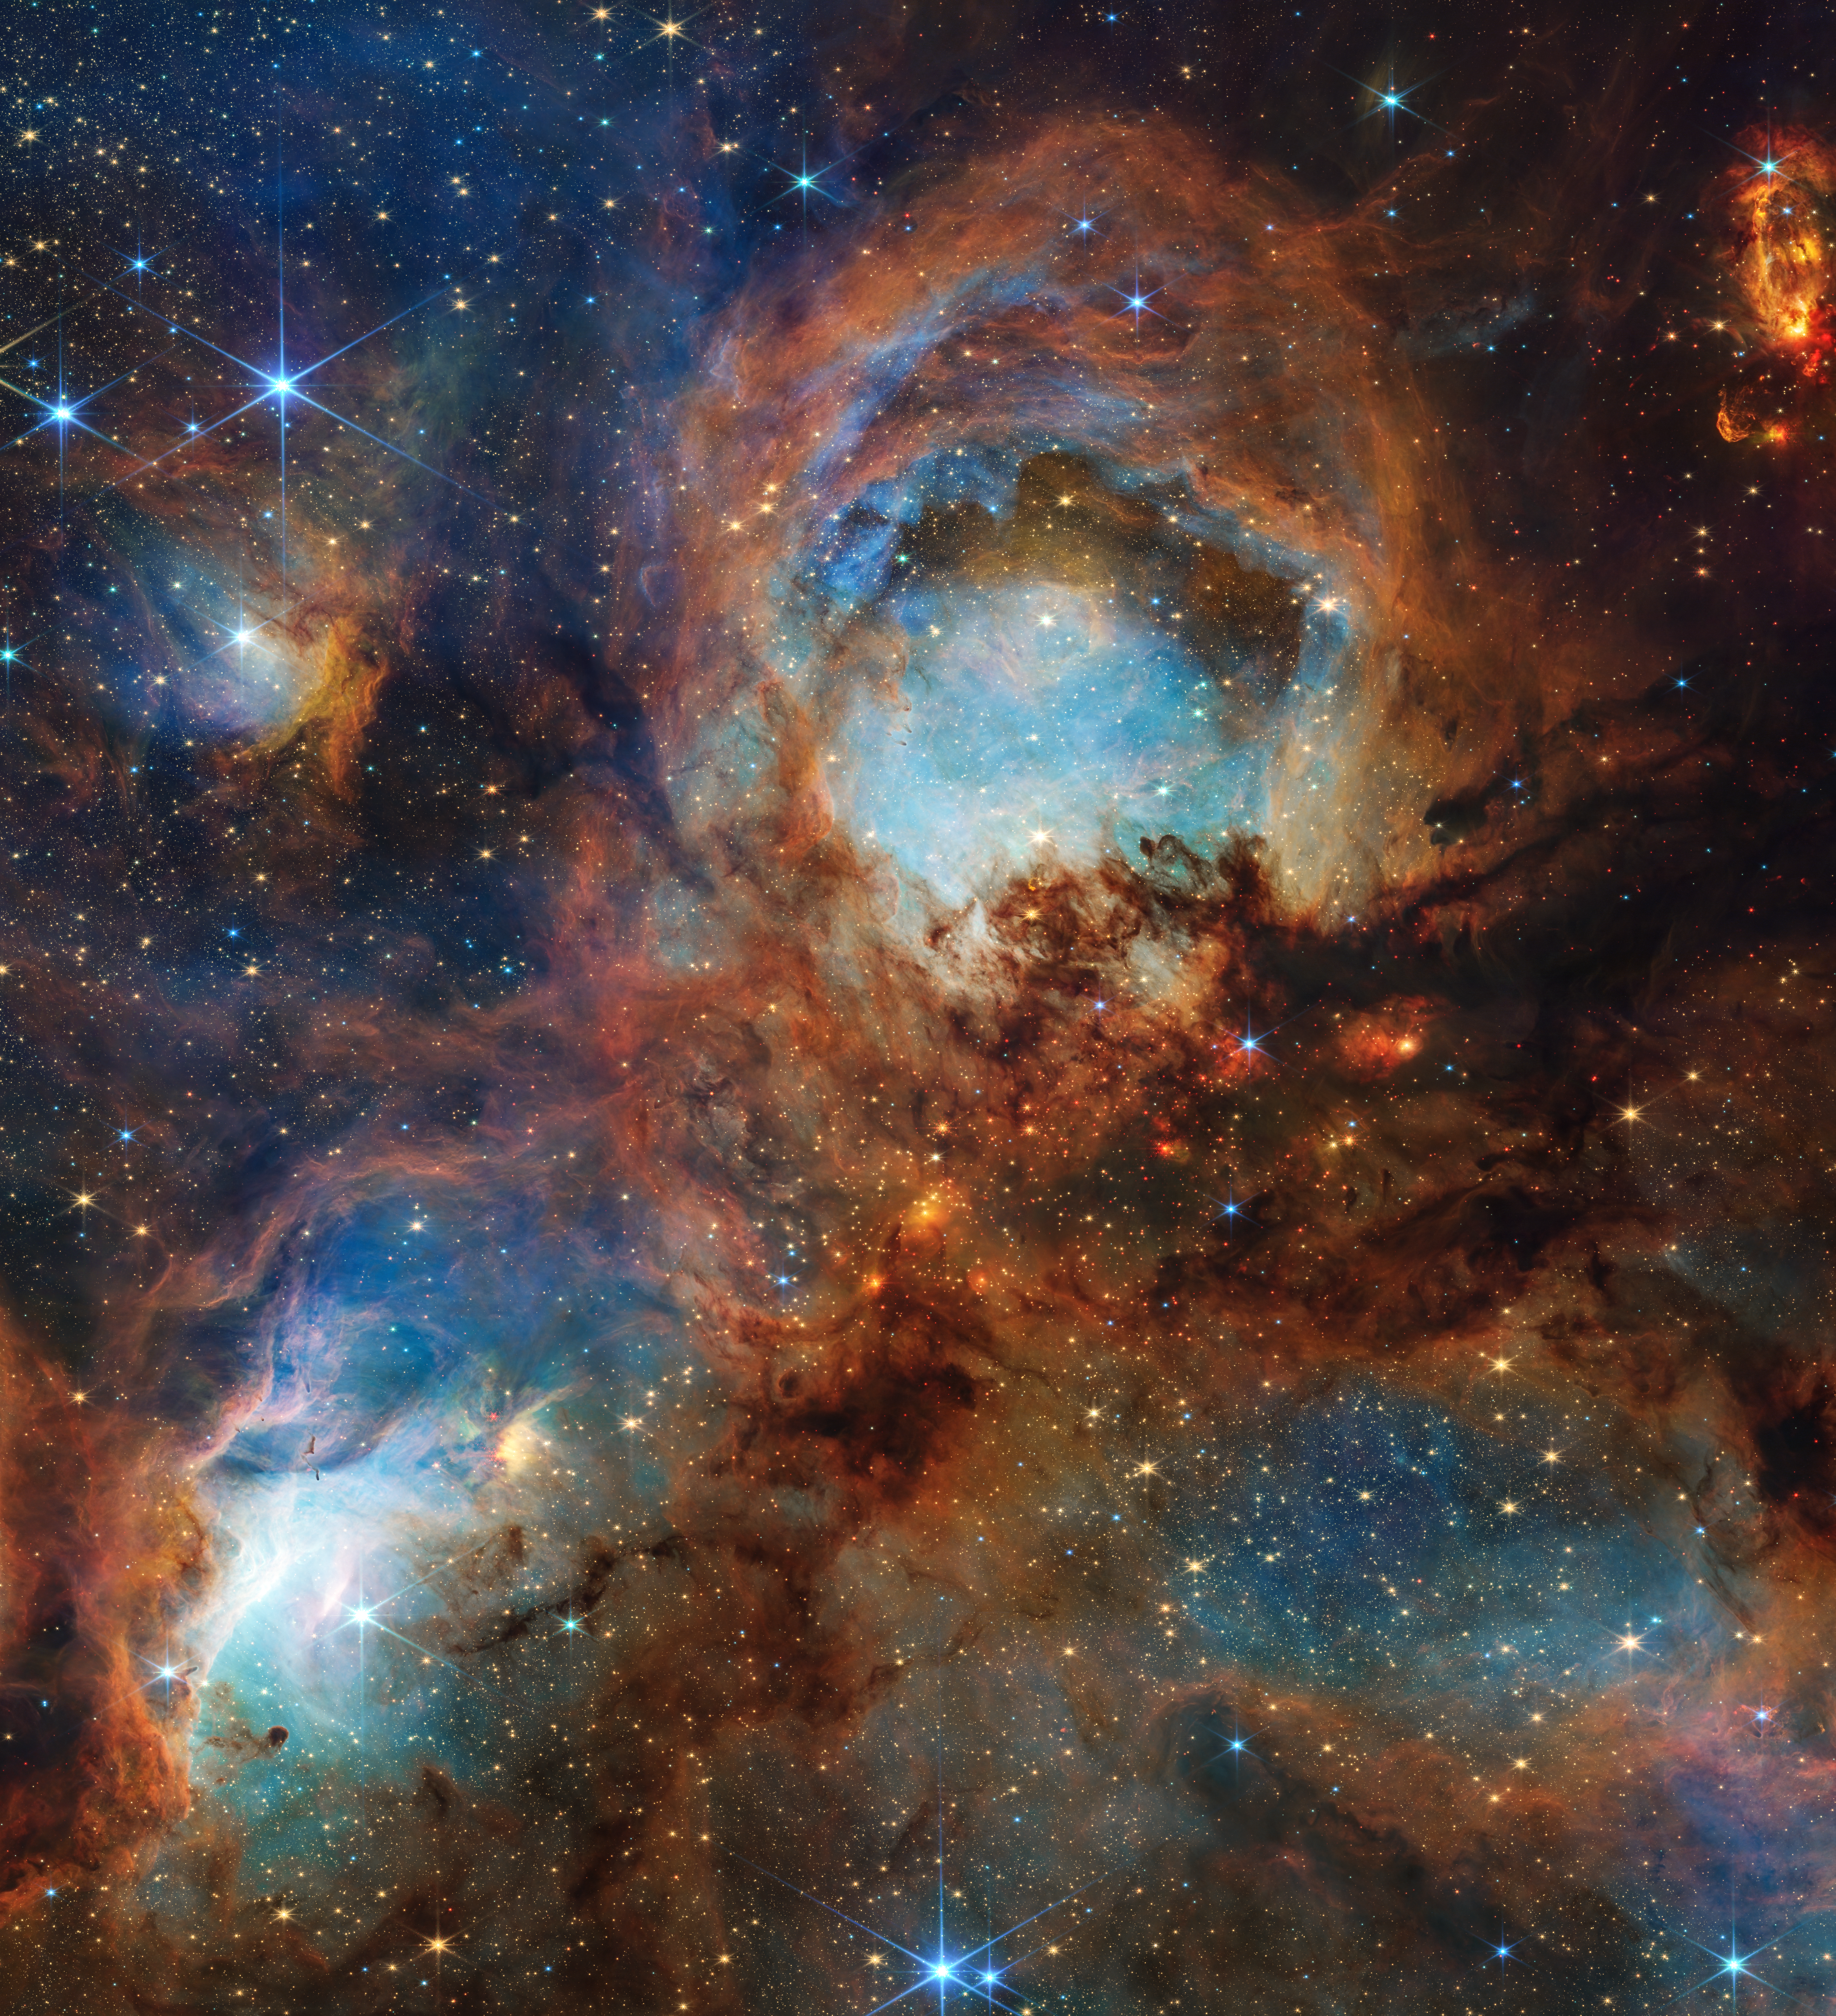

Cat’s Paw Nebula (NIRCam)

To celebrate the NASA/ESA/CSA James Webb Space Telescope’s third year of highly productive science, astronomers used the telescope to scratch beyond the surface of the Cat’s Paw Nebula (NGC 6334), a massive, local star-forming region. This area is of great interest to scientists, having been subject to previous study by NASA’s Hubble and retired Spitzer space telescopes, as they seek to understand the multiple steps required for a turbulent molecular cloud to transition to stars.

With its near-infrared capabilities and sharp resolution, the telescope “clawed” back a portion of a singular “toe bean,” revealing a subset of mini toe bean-reminiscent structures composed of gas, dust, and young stars.

Webb’s view reveals a chaotic scene still in development: Massive young stars are carving away at nearby gas and dust, while their bright starlight is producing a bright nebulous glow represented in blue. This is only a chapter in the region’s larger story. The disruptive young stars, with their relatively short lifespans and luminosity, will eventually quench the local star formation process.

The Cat’s Paw Nebula is located approximately 4,000 light-years away in the constellation Scorpius.

Credit: NASA, ESA, CSA, STScI